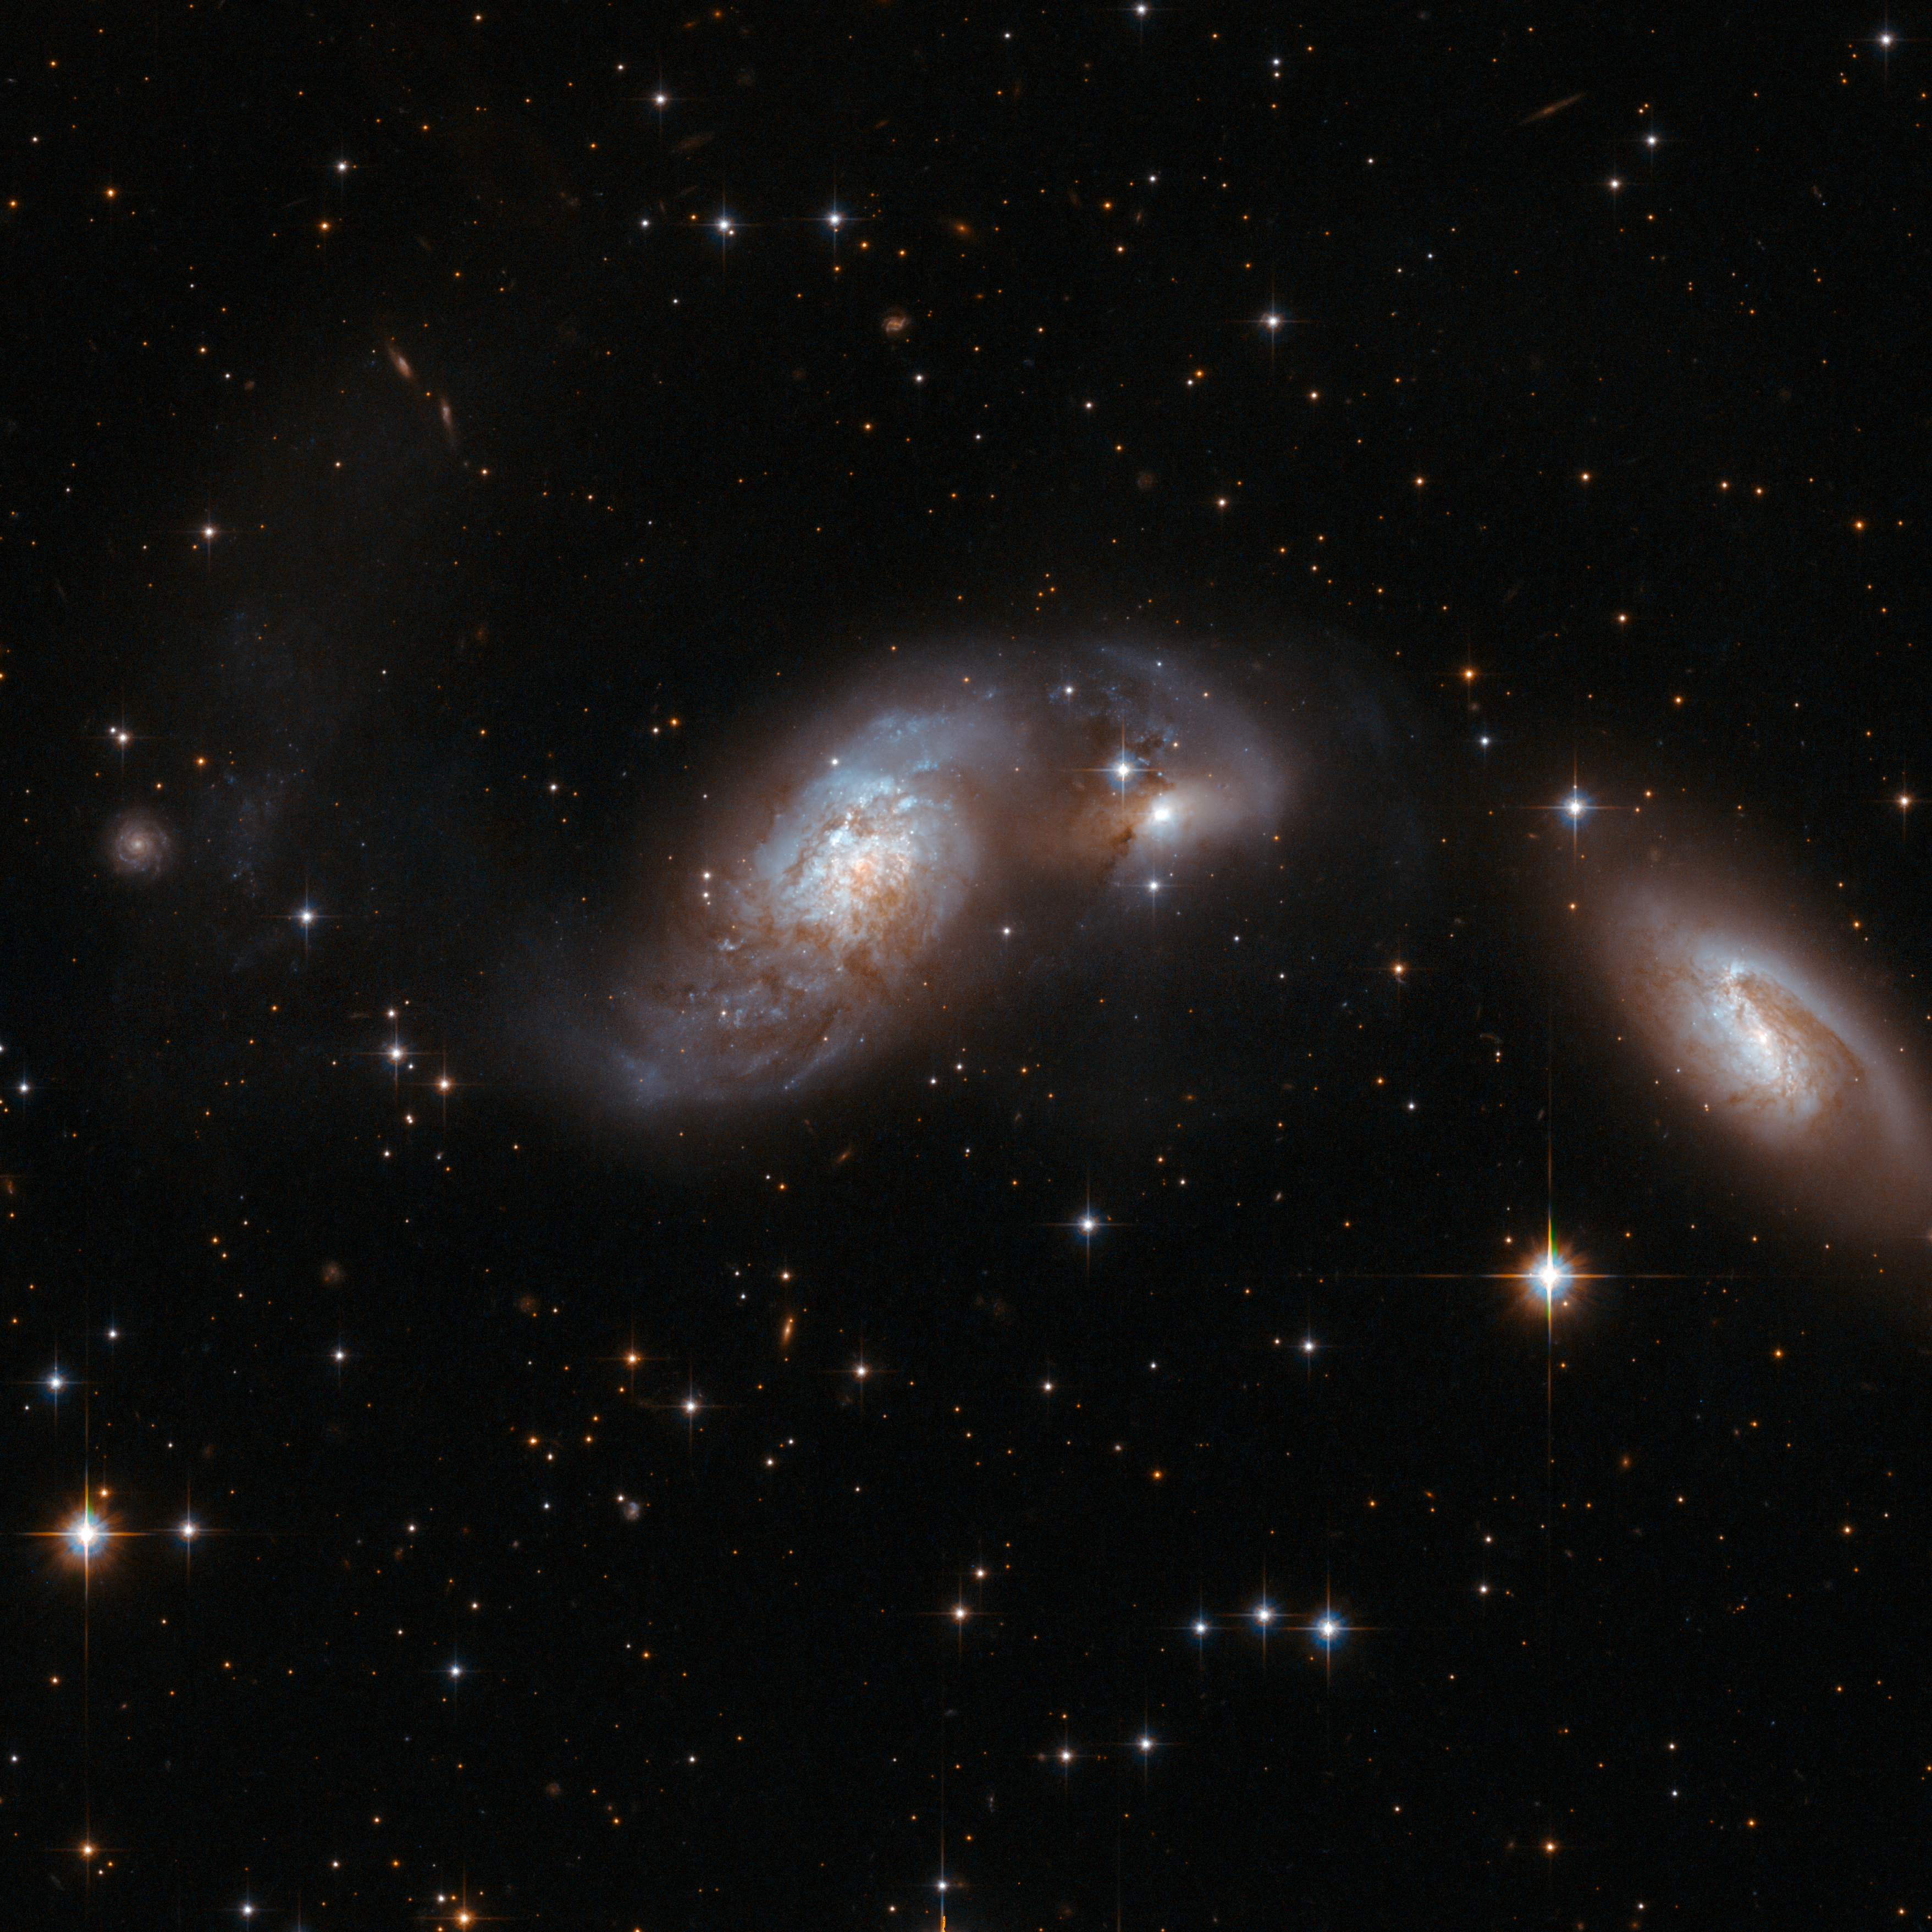

IC 4687

IC 4687 forms a triplet with two other galaxies: IC 4686 to the right and IC 4689 further to the right. IC 4687 has a chaotic body of stars, gas and dust and a large curly tail to the left. The two companions are partially obscured by dark bands of dust. The interacting triplet is about 250 million light-years away from Earth, in the constellation of Pavo, the Peacock.

This image is part of a large collection of 59 images of merging galaxies taken by the Hubble Space Telescope and released on the occasion of its 18th anniversary on 24th April 2008.

Credit: NASA, ESA, the Hubble Heritage Team (STScI/AURA)-ESA/Hubble Collaboration and A. Evans (University of Virginia, Charlottesville/NRAO/Stony Brook University)